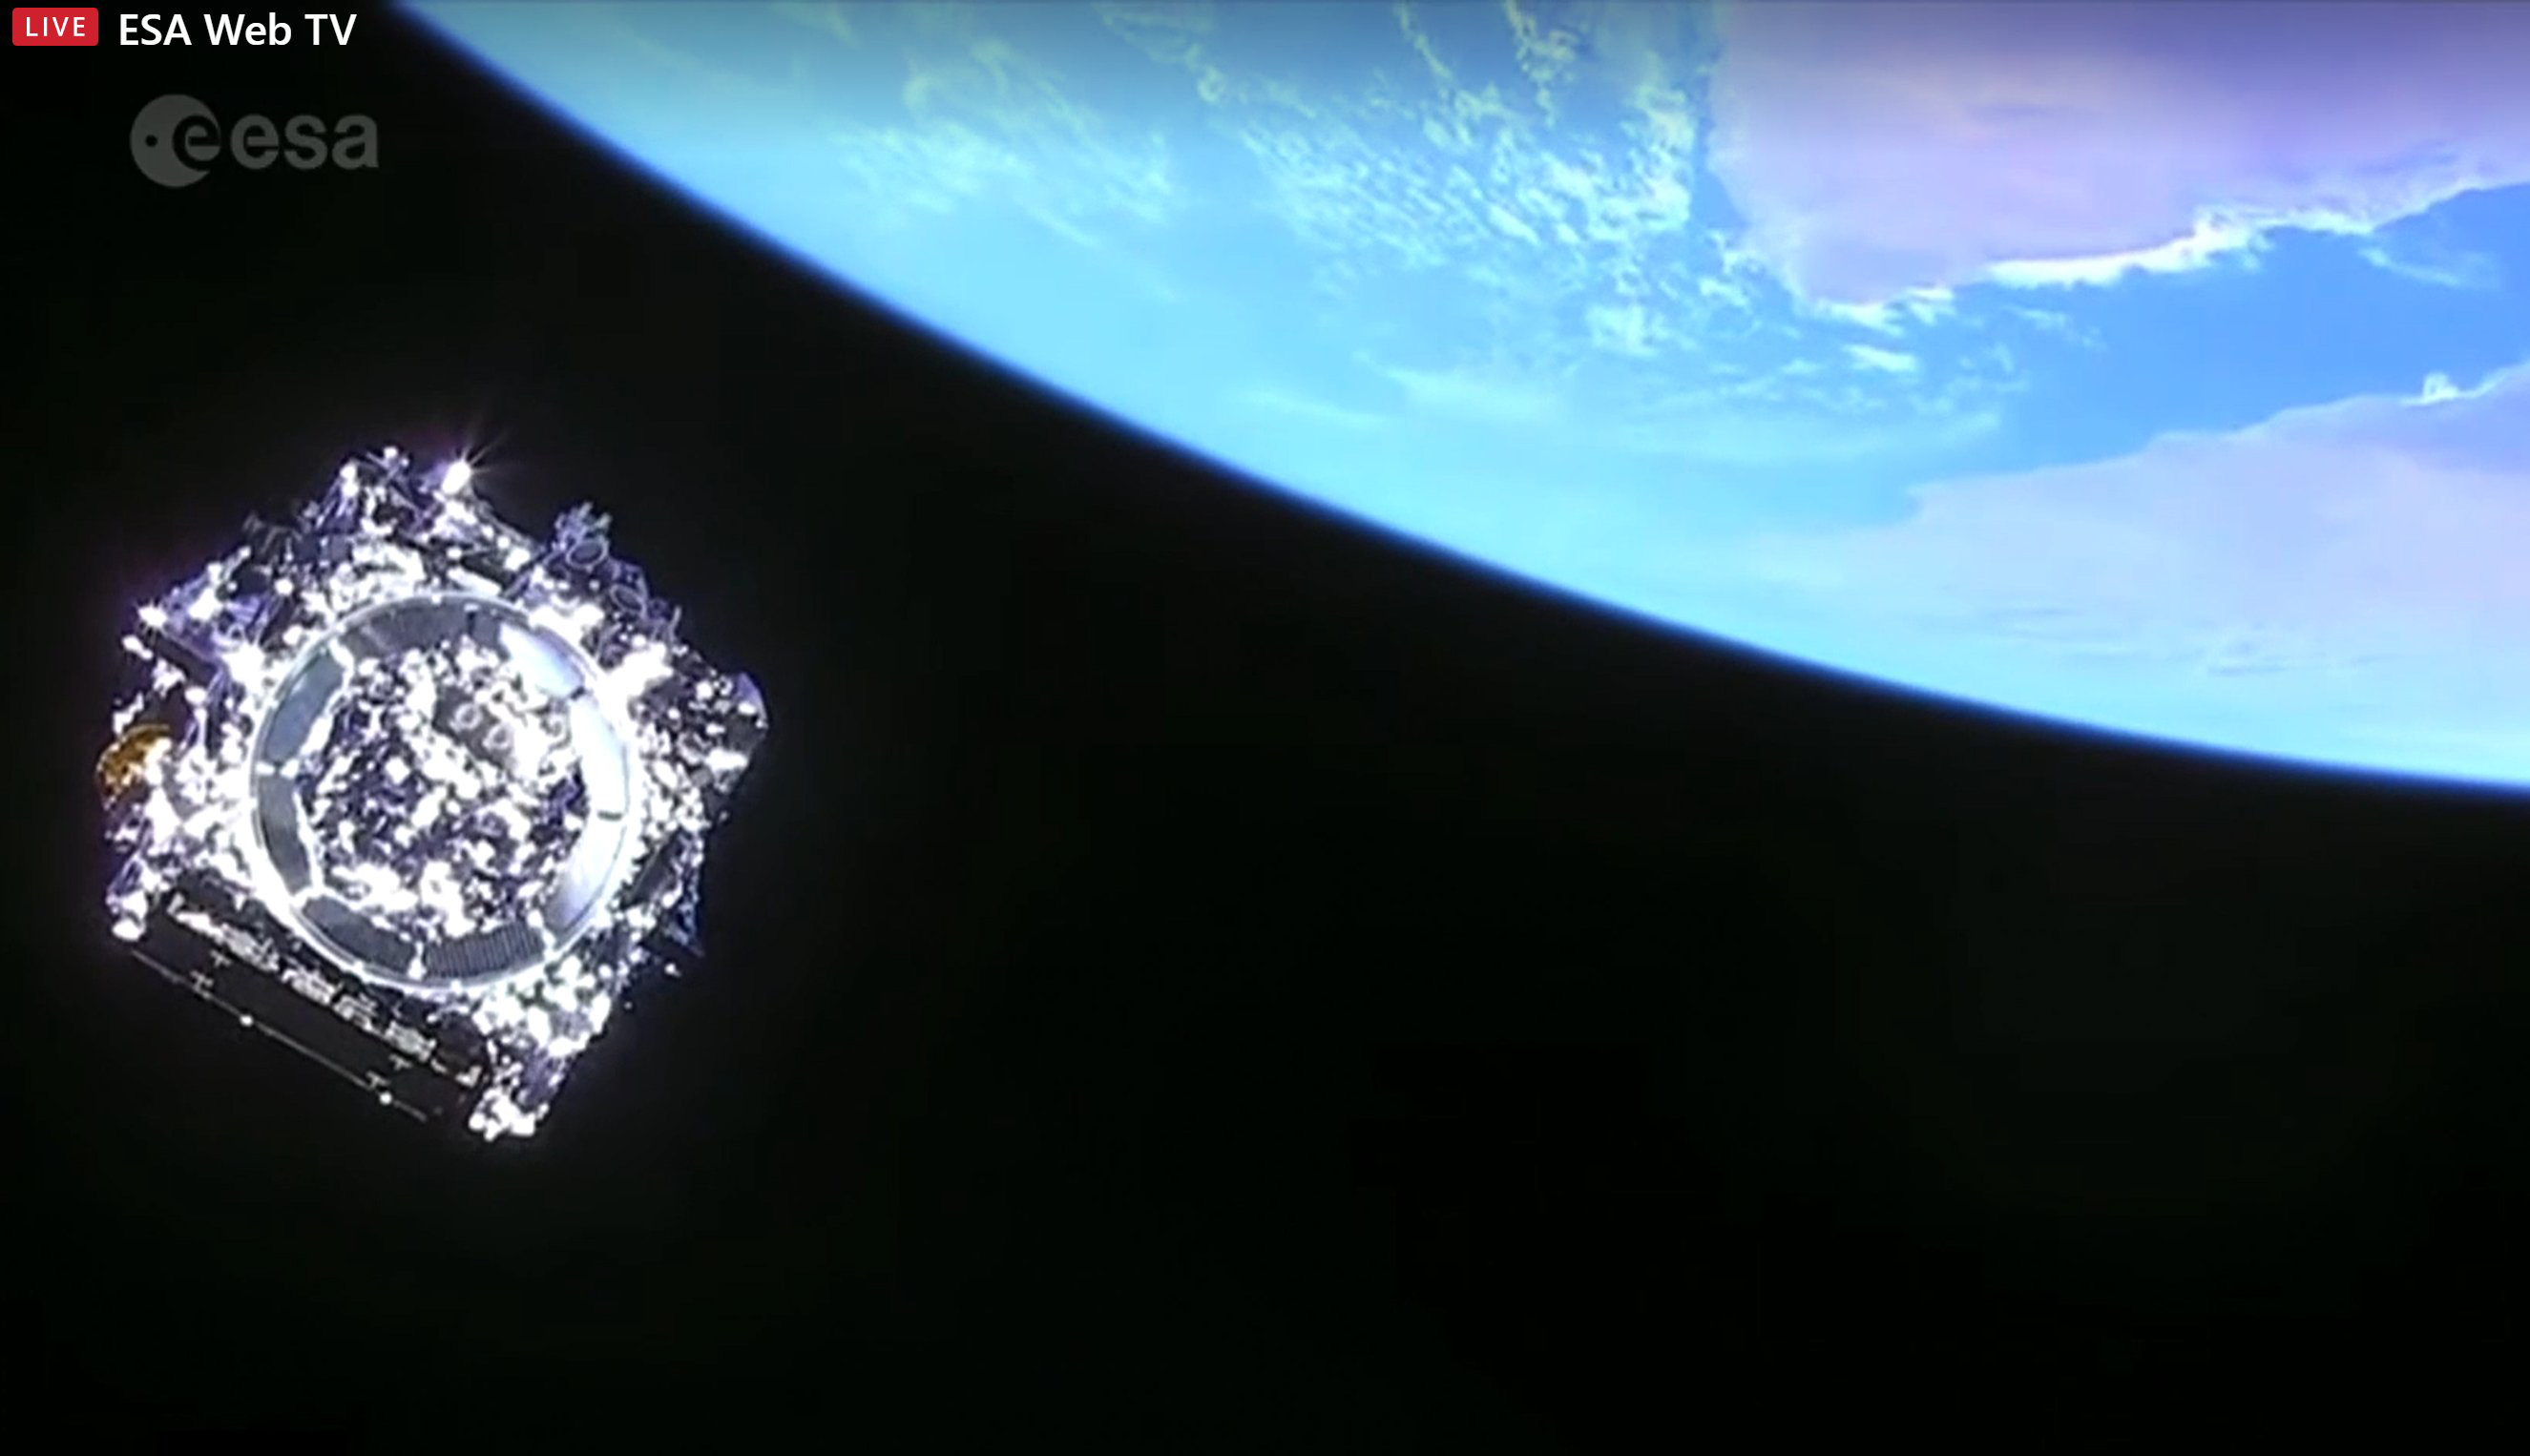

Separation of Webb

The NASA/ESA/CSA James Webb Space Telescope is separated from the Ariane 5 and flying on its own.

Credit: ESA